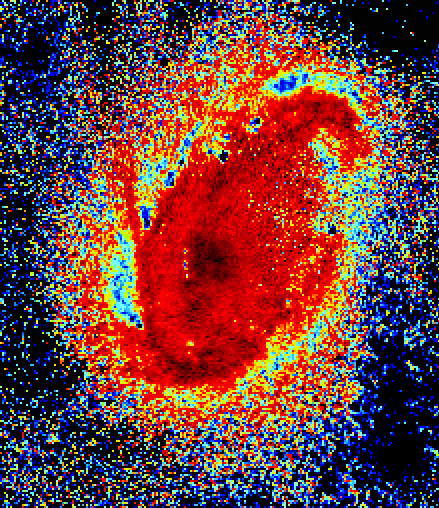

Cartwheel Galaxy Region

The Cartwheel's nucleus is shown in this Hubble Space Telescope color-coded image. The comet-like knots of gas are mostly confined to the core's left side. They are the blue knots arranged in a semi-circular pattern around the center of the nucleus. The 'heads' are a few hundred light-years across; the tails are more than 1, 000 light-years long, the longest of which is nearly 5, 000 light-years.

The structures look like comets because they probably were spawned by a collision between high-speed and slower-moving material. This collision created an arrowhead-shaped pattern called a bow shock, which is similar to the wake of a boat speeding across a lake.

Credit: Curt Struck and Philip Appleton (Iowa State University), Kirk Borne(Hughes STX Corporation), and Ray Lucas ( Space Telescope Science Institute), and NASA/ESA